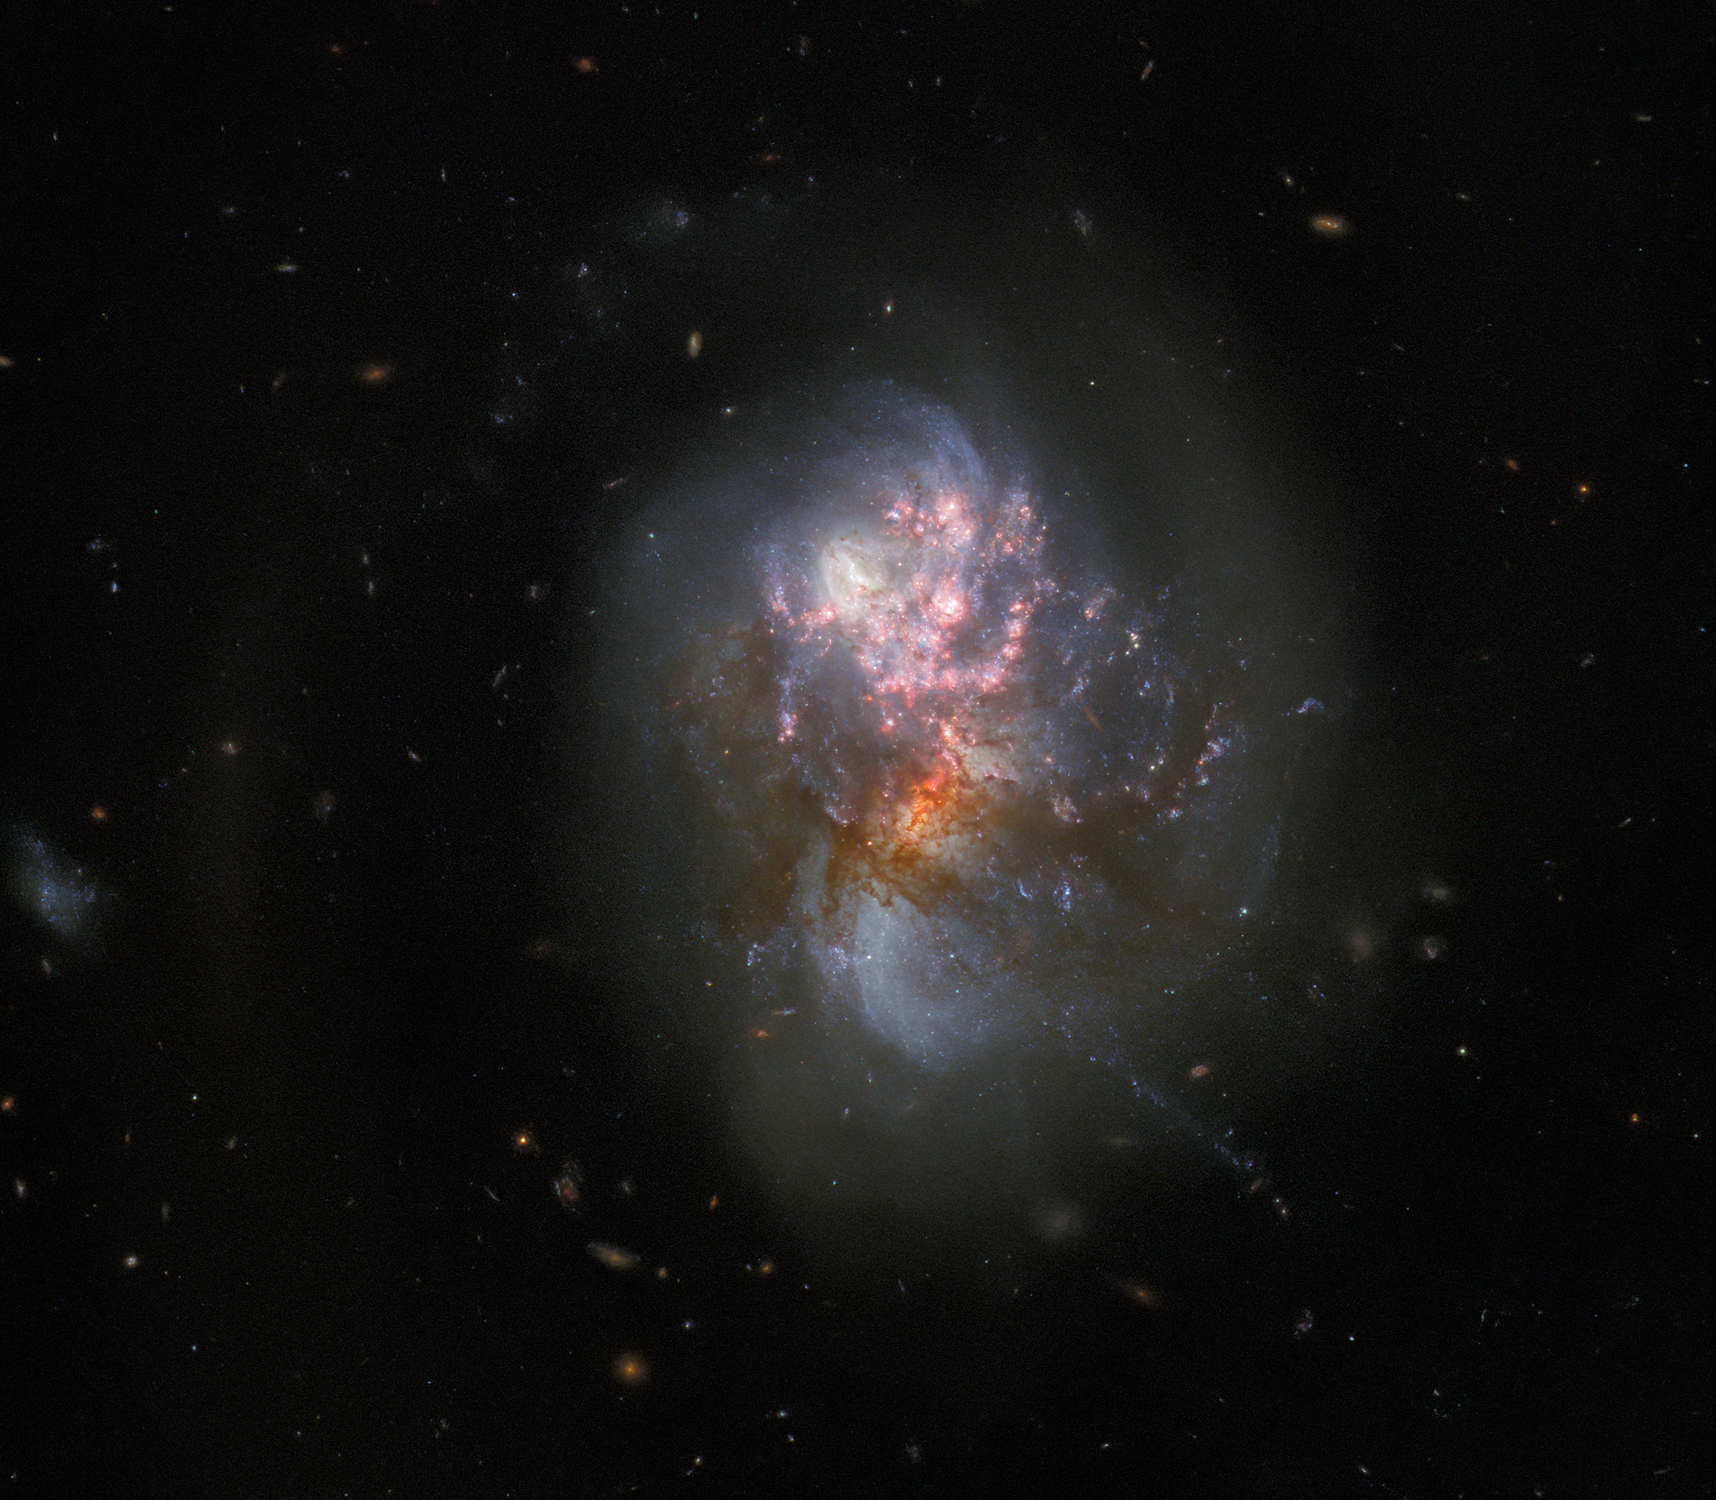

Exploring a Pair of Merging Galaxies (Hubble Image)

This image from the NASA/ESA Hubble Space Telescope depicts IC 1623, an entwined pair of interacting galaxies which lies around 270 million light-years from Earth in the constellation Cetus. The two galaxies in IC 1623 are plunging headlong into one another in a process known as a galaxy merger. Their collision has ignited a frenzied spate of star formation known as a starburst, creating new stars at a rate more than twenty times that of the Milky Way galaxy.

This image, combines data from Hubble’s ACS and WFC3 instruments, gives a familiar visible-light view of these colliding galaxies, where the centres of the individual galaxies are more obscured by dark dust.

Credit: ESA/Hubble & NASA, R. Chandar